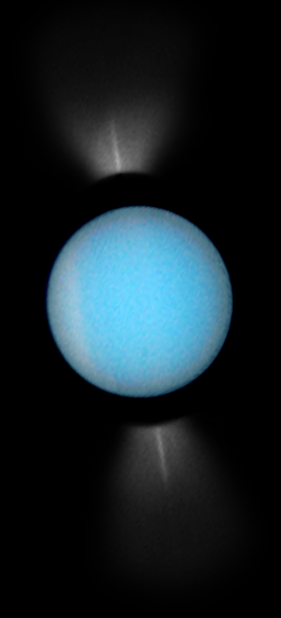

Uranus 2007

Uranus as seen by the NASA/ESA Hubble Space Telescope in 2007.

Credit: NASA, ESA, and M. Showalter (SETI Institute)